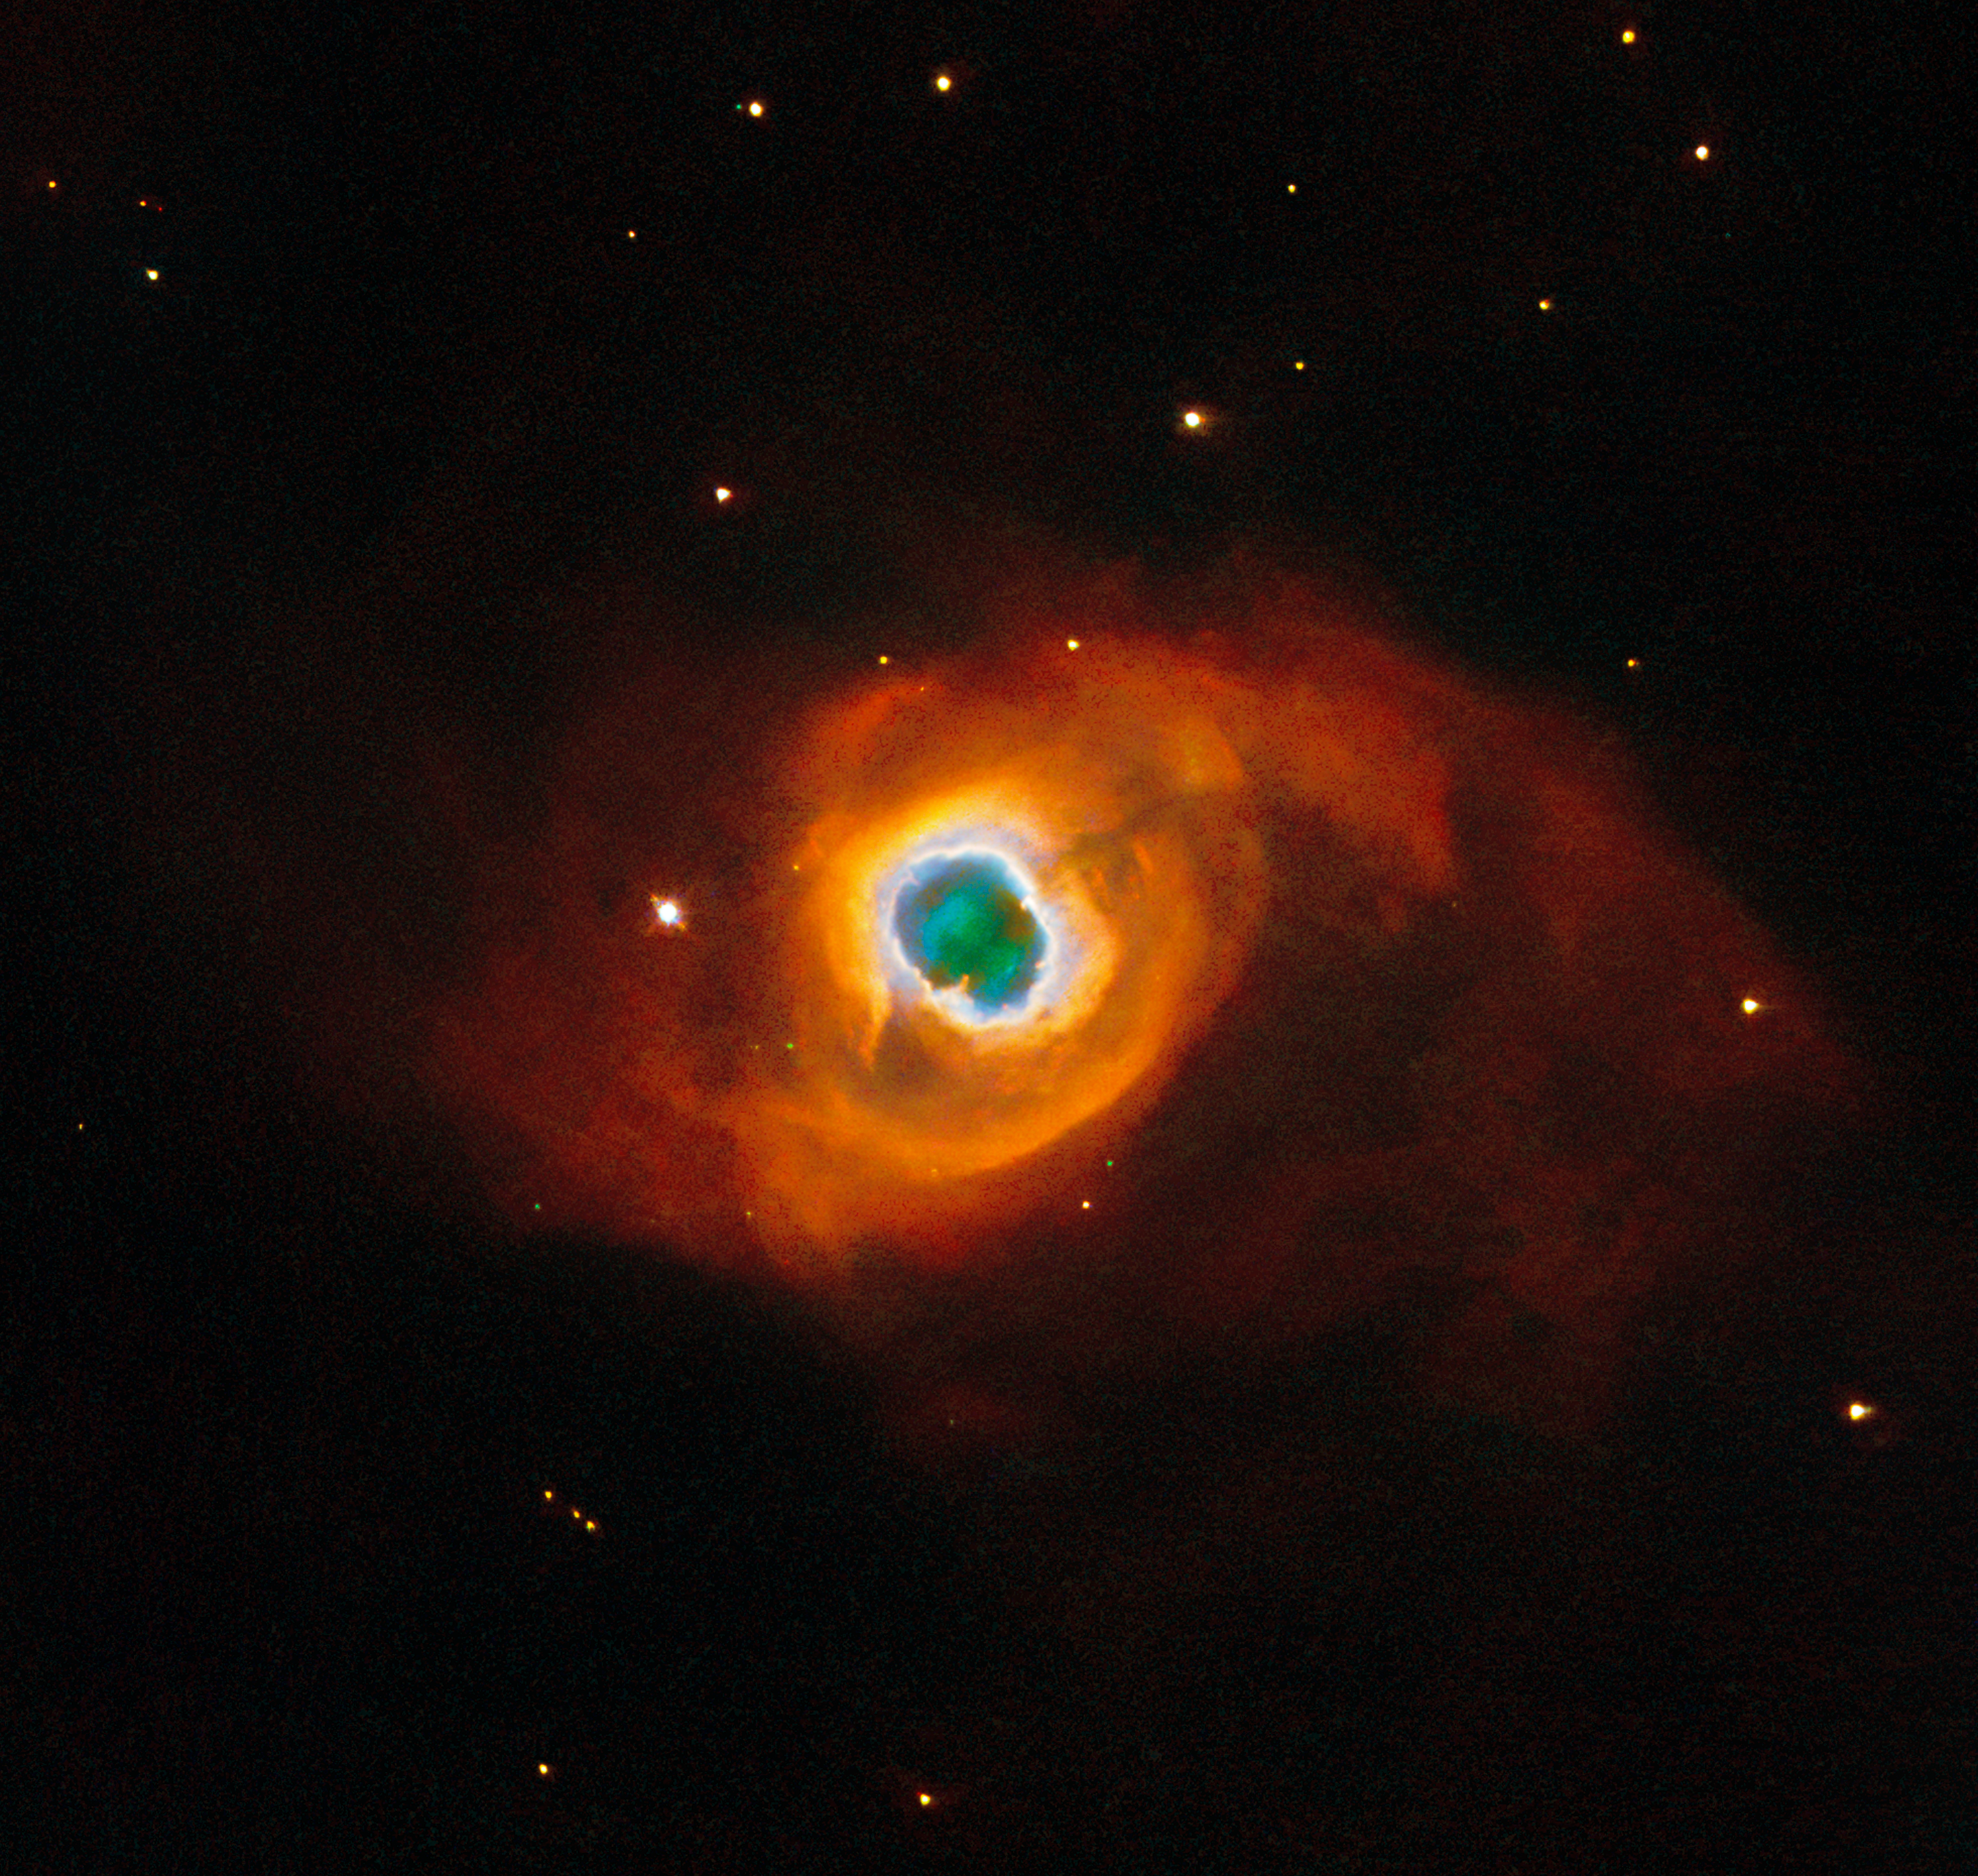

Swan song for stars and cameras

The swirling, paint-like clouds in the darkness of space in this stunning image seem surreal, like a portal to another world opening up before us. In fact, the subject of this ESA/Hubble Picture of the Week is very real. We are seeing vast clouds of ionised atoms and molecules, thrown into space by a dying star. This is a planetary nebula named Kohoutek 4-55, a member of the Milky Way galaxy situated just 4600 light-years away in the constellation Cygnus (the Swan).

Planetary nebulae are the spectacular final display at the end of a giant star’s life. Once a red giant star has exhausted its available fuel and shed its last layers of gas, its compact core will contract further, enabling a final burst of nuclear fusion. The exposed core reaches extremely hot temperatures, radiating very energetic ultraviolet light that energises the enormous clouds of cast-off gas. Molecules in the gas are ionised and glow brightly; here, red and orange indicate nitrogen molecules, green is hydrogen and blue shows oxygen in the nebula. Kohoutek 4-55 has an uncommon, multi-layered form: a bright inner ring is surrounded by a fainter layer of gas, all wrapped in a broad halo of ionised nitrogen. The spectacle is bittersweet, as the brief phase of fusion in the core will end after mere tens of thousands of years, leaving a white dwarf that will never illuminate the clouds around it again.

This image itself is also a swan song, the final work of one of Hubble’s instruments: the Wide Field and Planetary Camera 2 (WFPC2). Installed in 1993 to replace the original Wide Field and Planetary Camera, WFPC2 was responsible for some of Hubble’s most enduring images and fascinating discoveries. It in turn was replaced by the Wide Field Camera 3 in 2009, during Hubble’s final servicing mission. The data for this image were taken a mere ten days before the instrument was removed from the telescope, as a fitting send-off for WFPC2 after 16 years’ work. The latest and most advanced processing techniques have been used to bring the data to life one more time, producing this breathtaking new view of Kohoutek 4-55.

Credit: ESA/Hubble & NASA, K. Noll